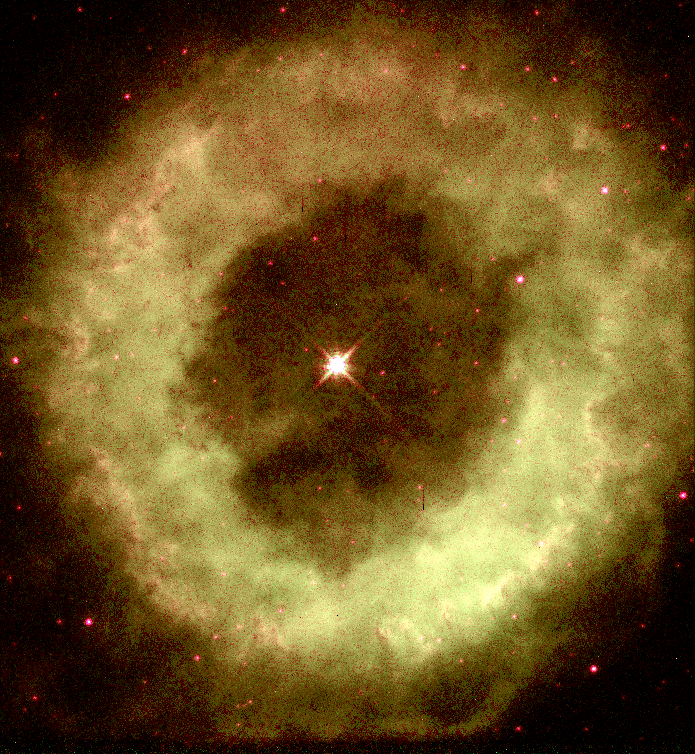

NGC 6369

This image is a part of the Hubble Gallery of Planetary Nebulae.

Credit: Howard Bond (ST ScI) and NASA/ESA